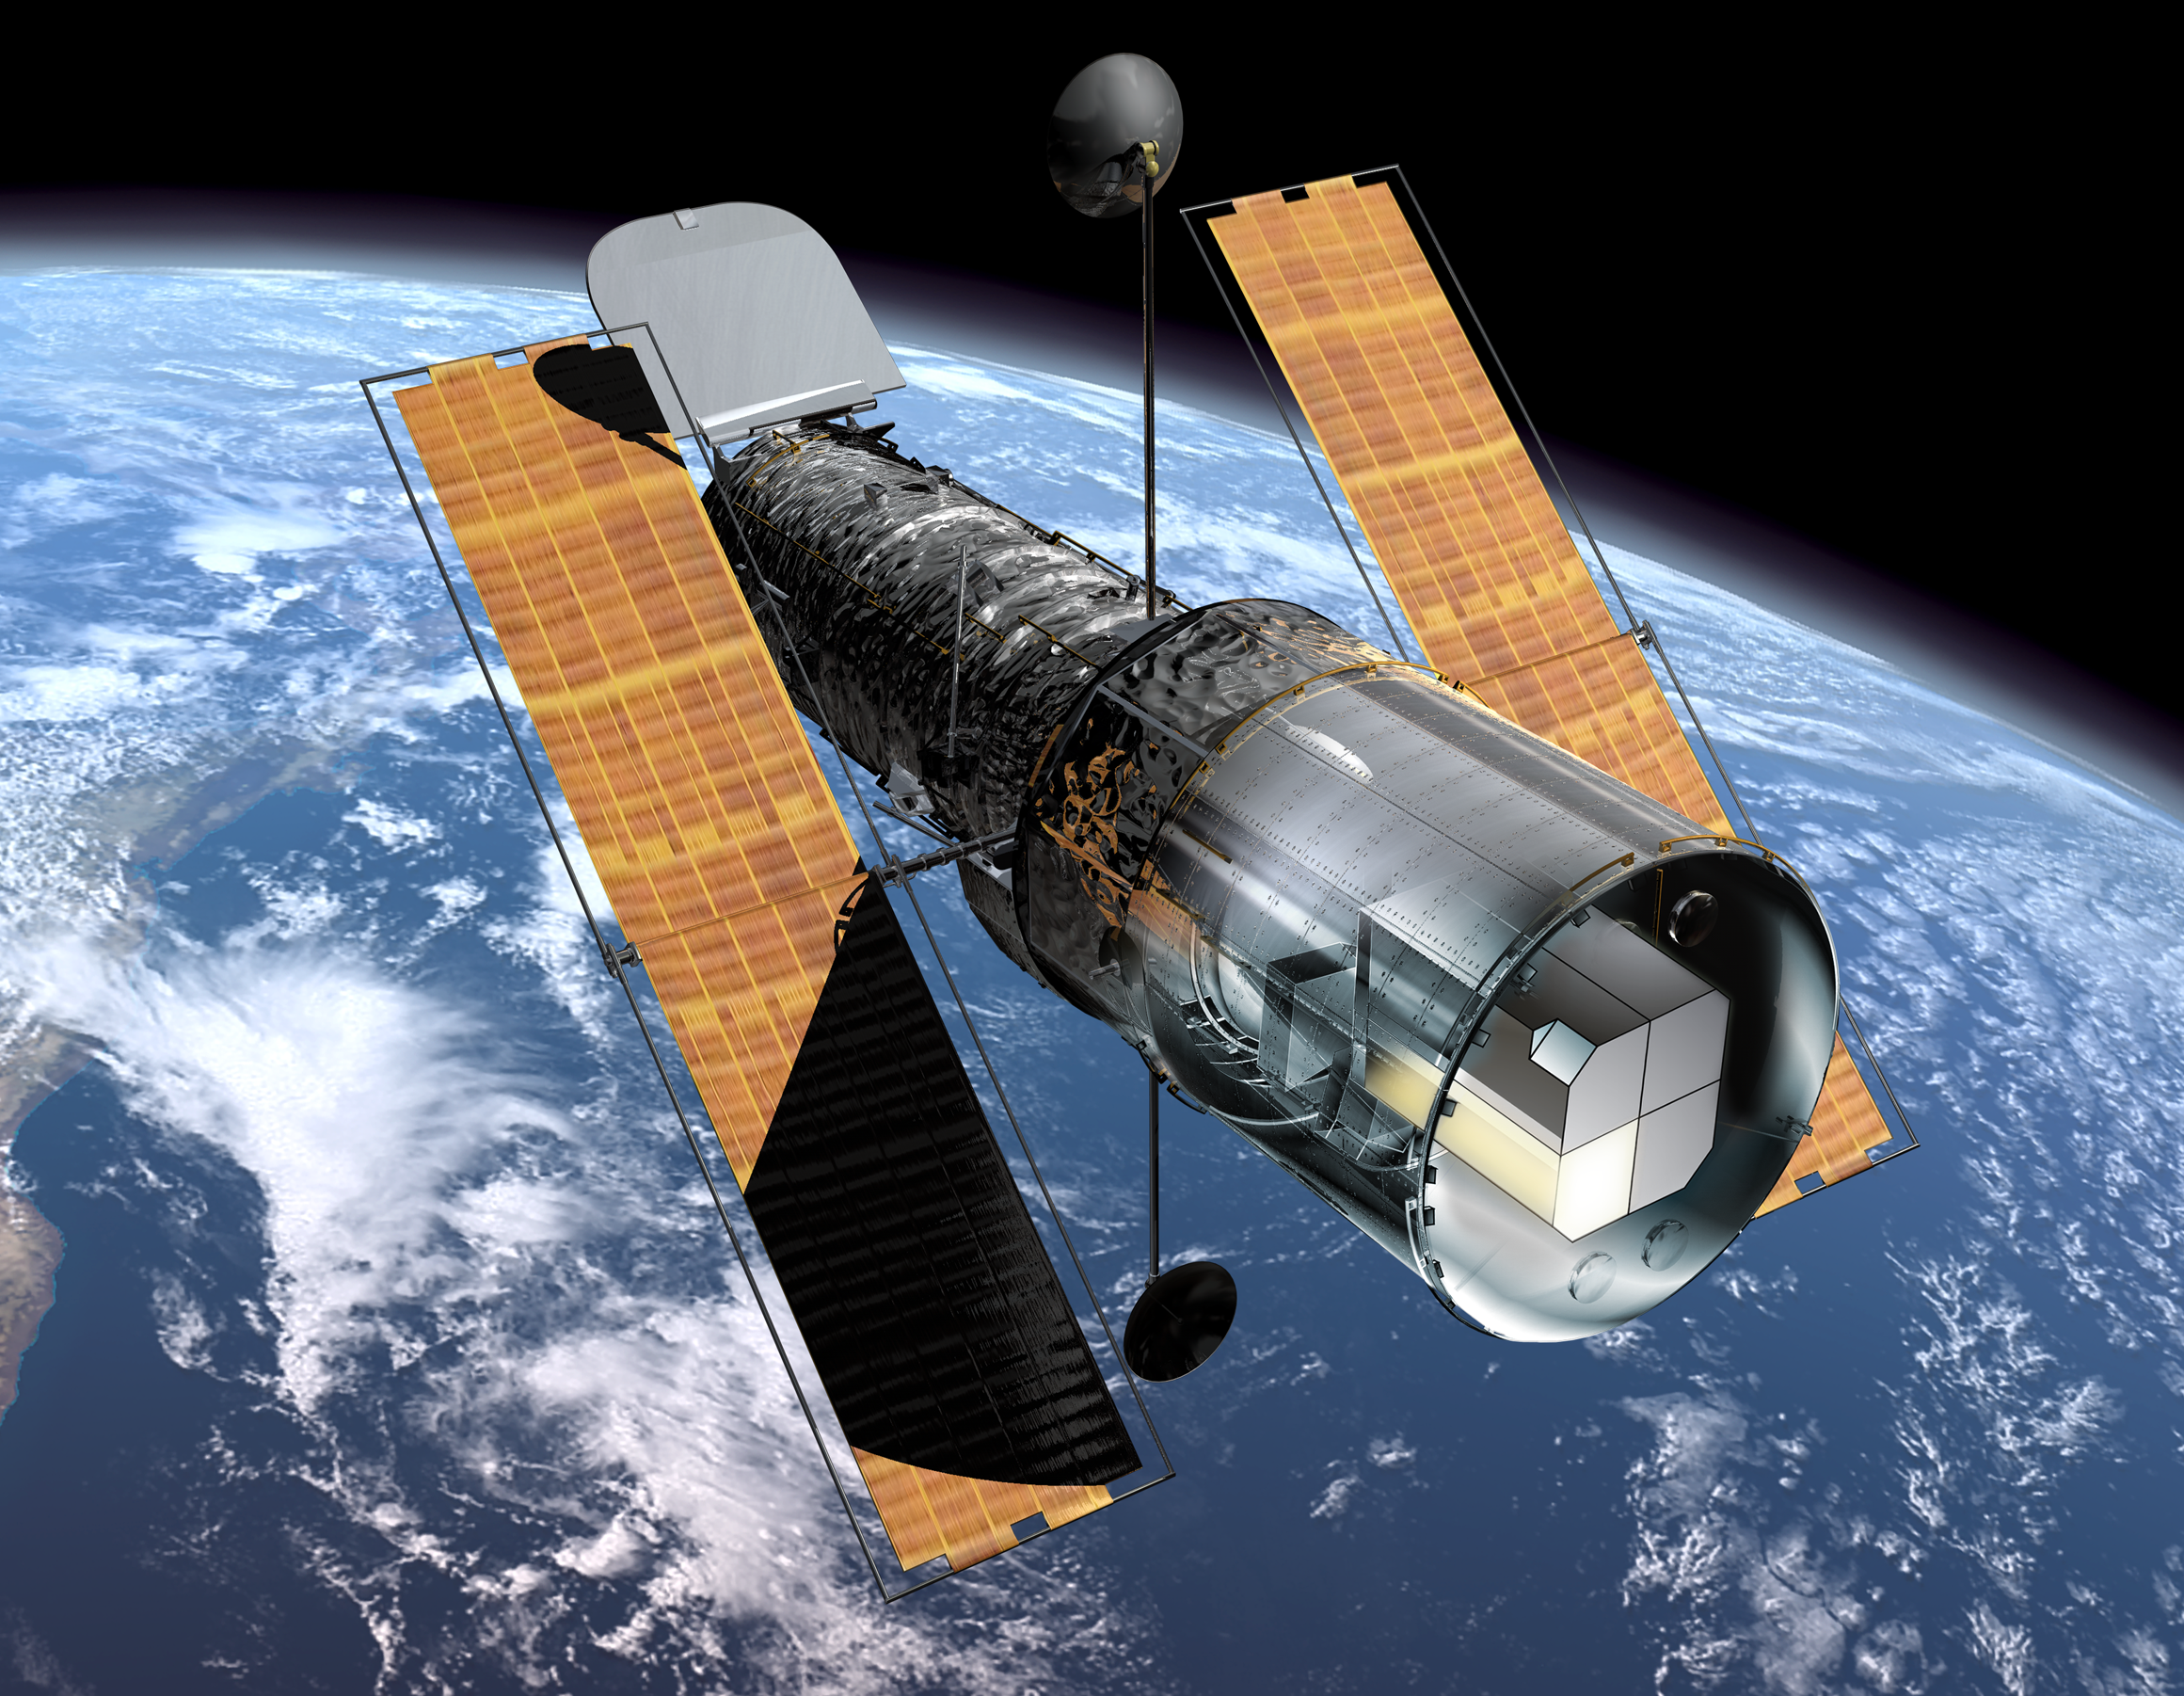

The Hubble Space Telescope and the Faint Object Spectrograph

This illustration shows the NASA/ESA Hubble Space Telescope in orbit above the Earth as it looked before the Second Servicing Mission in 1997. The Faint Object Spectrograph (FOS) can be seen (marked in yellow) in Hubble's instrument bay at the back of the observatory. During the Second Servicing Mission the two first generation instruments, FOS and the Goddard High Resolution Spectrograph (GHRS), were replaced by the second generation instruments, NICMOS (Near Infrared Camera and Multi-Object Spectrometer) and STIS (Space Telescope Imaging Spectrograph). A dedicated team effort to understand and correct systematic effects in observations from FOS has now been concluded and the results are released on 11 September 2001. A four-person team based at the Space Telescope-European Coordinating Facility (ST-ECF) in Garching, Germany, has carried out this re-calibration with support from scientists at the Space Telescope Science Institute and the Goddard Space Flight Center. ST-ECF's 'Instrument Physical Modelling Group' has expended ten man-years of effort in understanding the intricate details of the instrument and in developing a novel physical model of its operation. This has allowed them to develop routines to correct for unwanted instrumental and environmental effects in the measurements of stars and galaxies.

Credit: ESA